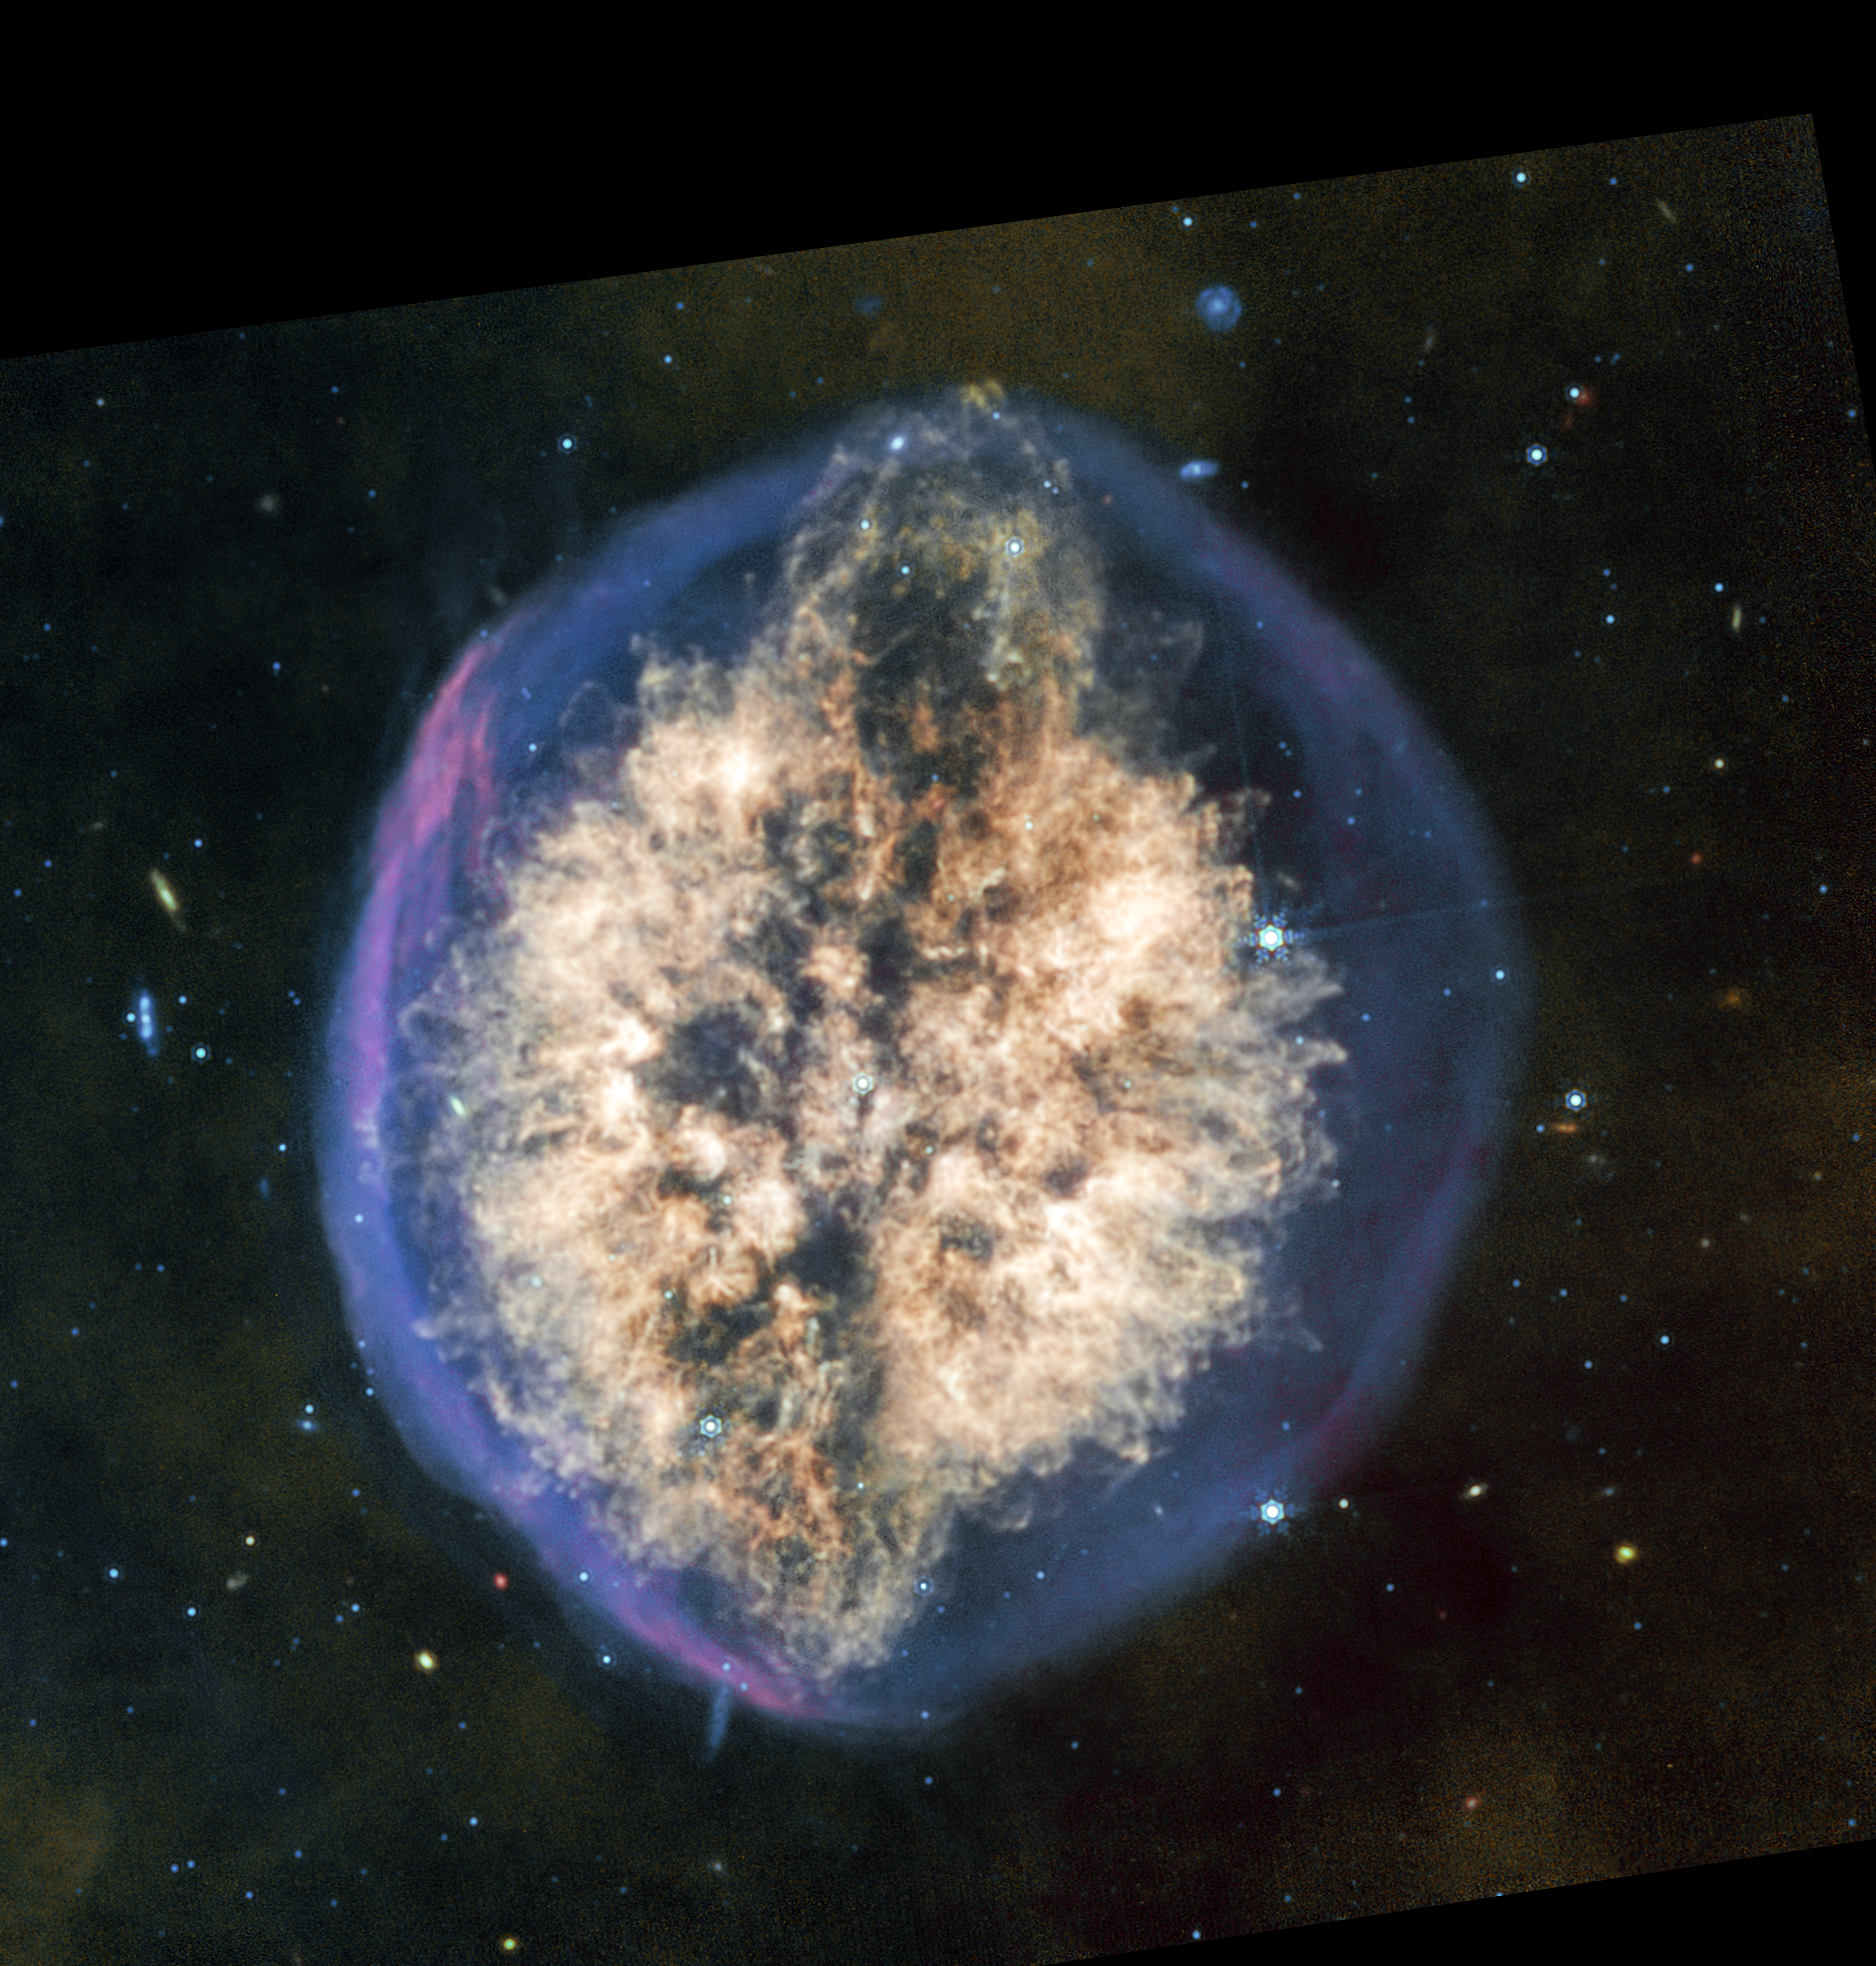

Exposed Cranium Nebula (MIRI image)

More of the dusty material in the nebula PMR 1 shows up in the mid-infrared light captured by the James Webb Space Telescope’s MIRI (Mid-Infrared Instrument). Fewer stars and background galaxies appear in this image than in the near-infrared light captured by Webb’s NIRCam (Near-Infrared Camera) instrument. Seeing the nebula in different wavelengths of infrared light will give astronomers a better idea of how much material the dying star at the heart of the nebula is shedding, and what phase of its decline Webb has captured.

Like NIRCam, MIRI also shows two distinctly different-looking phases of the nebula’s formation — an outer shell primarily of hydrogen that was blown off first, then a more complex and structured mix of material closer to the centre of the nebula. Together, these episodes give the nebula the unusual appearance of a brain inside a semi-transparent skull.

The MIRI instrument shows the ejection of material at the top of the nebula more prominently than NIRCam, interrupting the overall oval, brain-like shape. Less prominent is a potential twin ejection on the opposite, bottom side, hinting at a potential bipolar outflow that, with further analysis, can shed light on the dynamics at play inside this “exposed cranium.”

Credit: NASA, ESA, CSA, STScI, Image Processing: Joseph DePasquale (STScI)